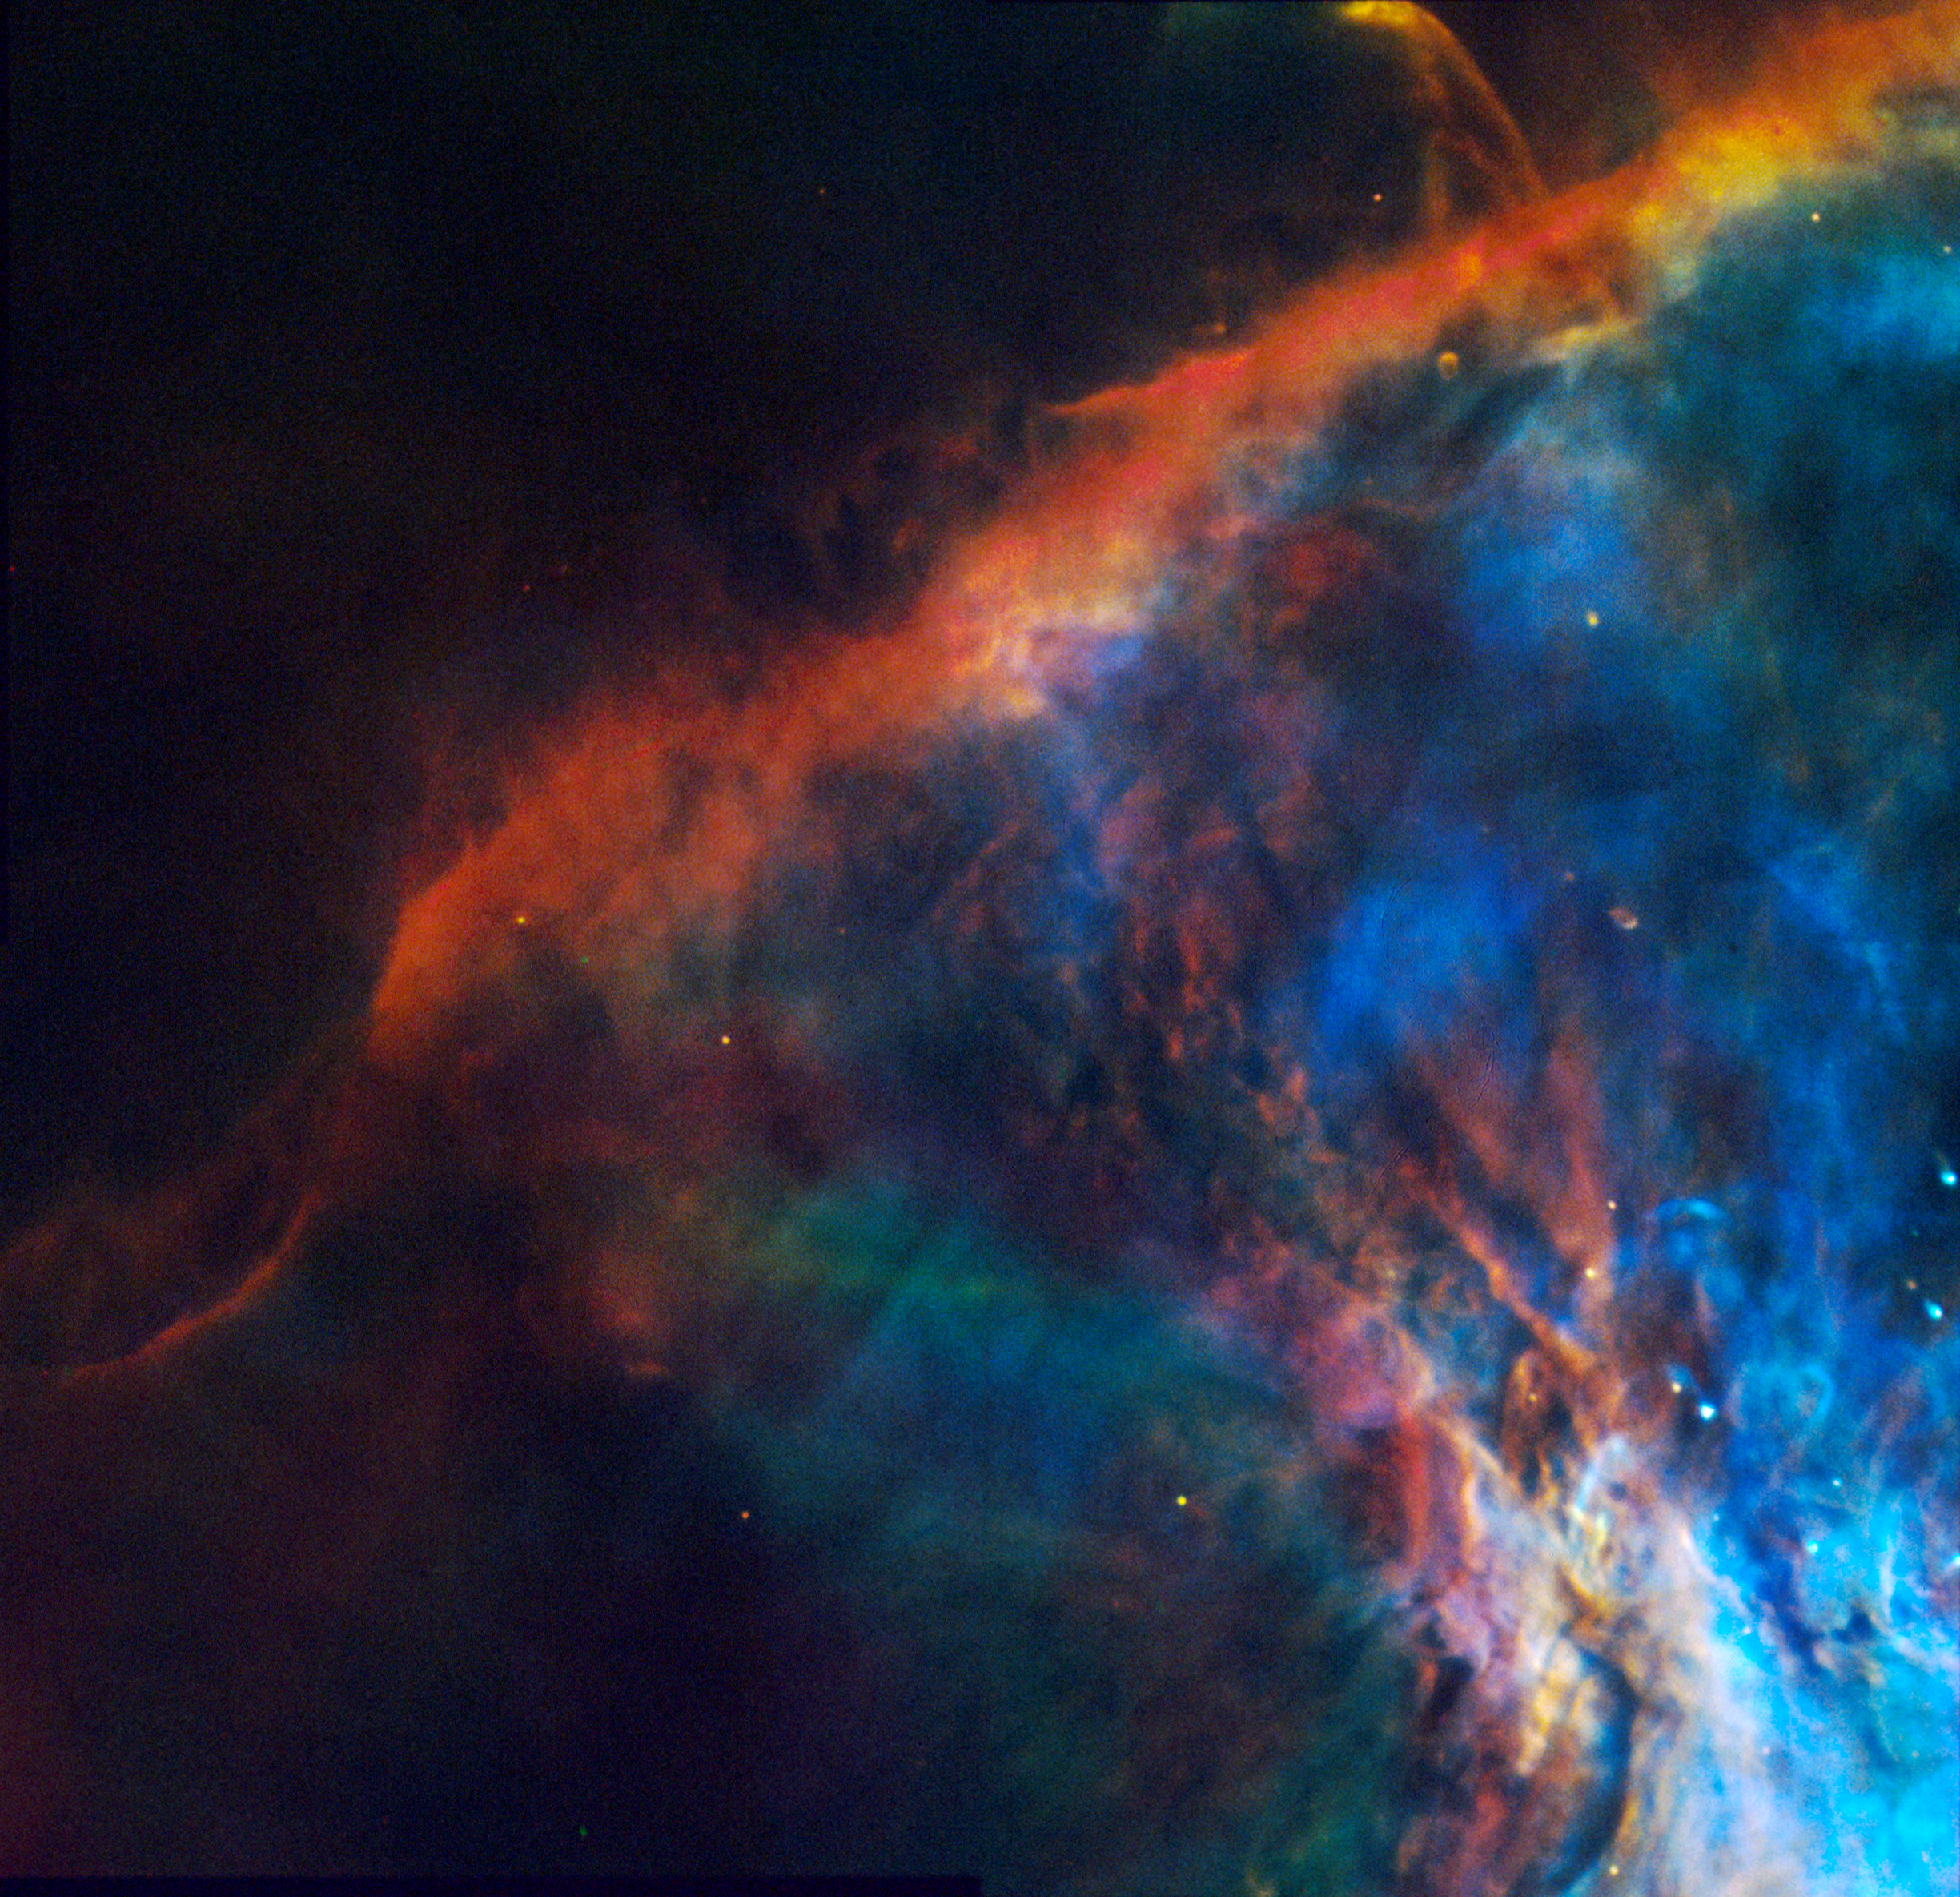

Gas Plume Near the Edge of the Orion Nebula

A NASA Hubble Space Telescope "true color" mosaic image of a small portion of the Orion Nebula, taken the Wide Field and Planetary Camera (in wide field mode).

Hubble shows a wealth of detail never seen before in the nebula. New features include: elongated objects oriented on the brightest stars in this region (which are located just off the edge of the picture); rapidly expanding plumes of material around young stars; and protoplanetary disks.

This color photograph is a composite of separate images taken at the wavelengths of three abundant elements in the nebula: Hydrogen, Oxygen and Nitrogen. The images were taken August 13 and 14, 1991.

The image is 1.29 light-years across.

Credit: C.R. O'Dell (Rice University), and NASA